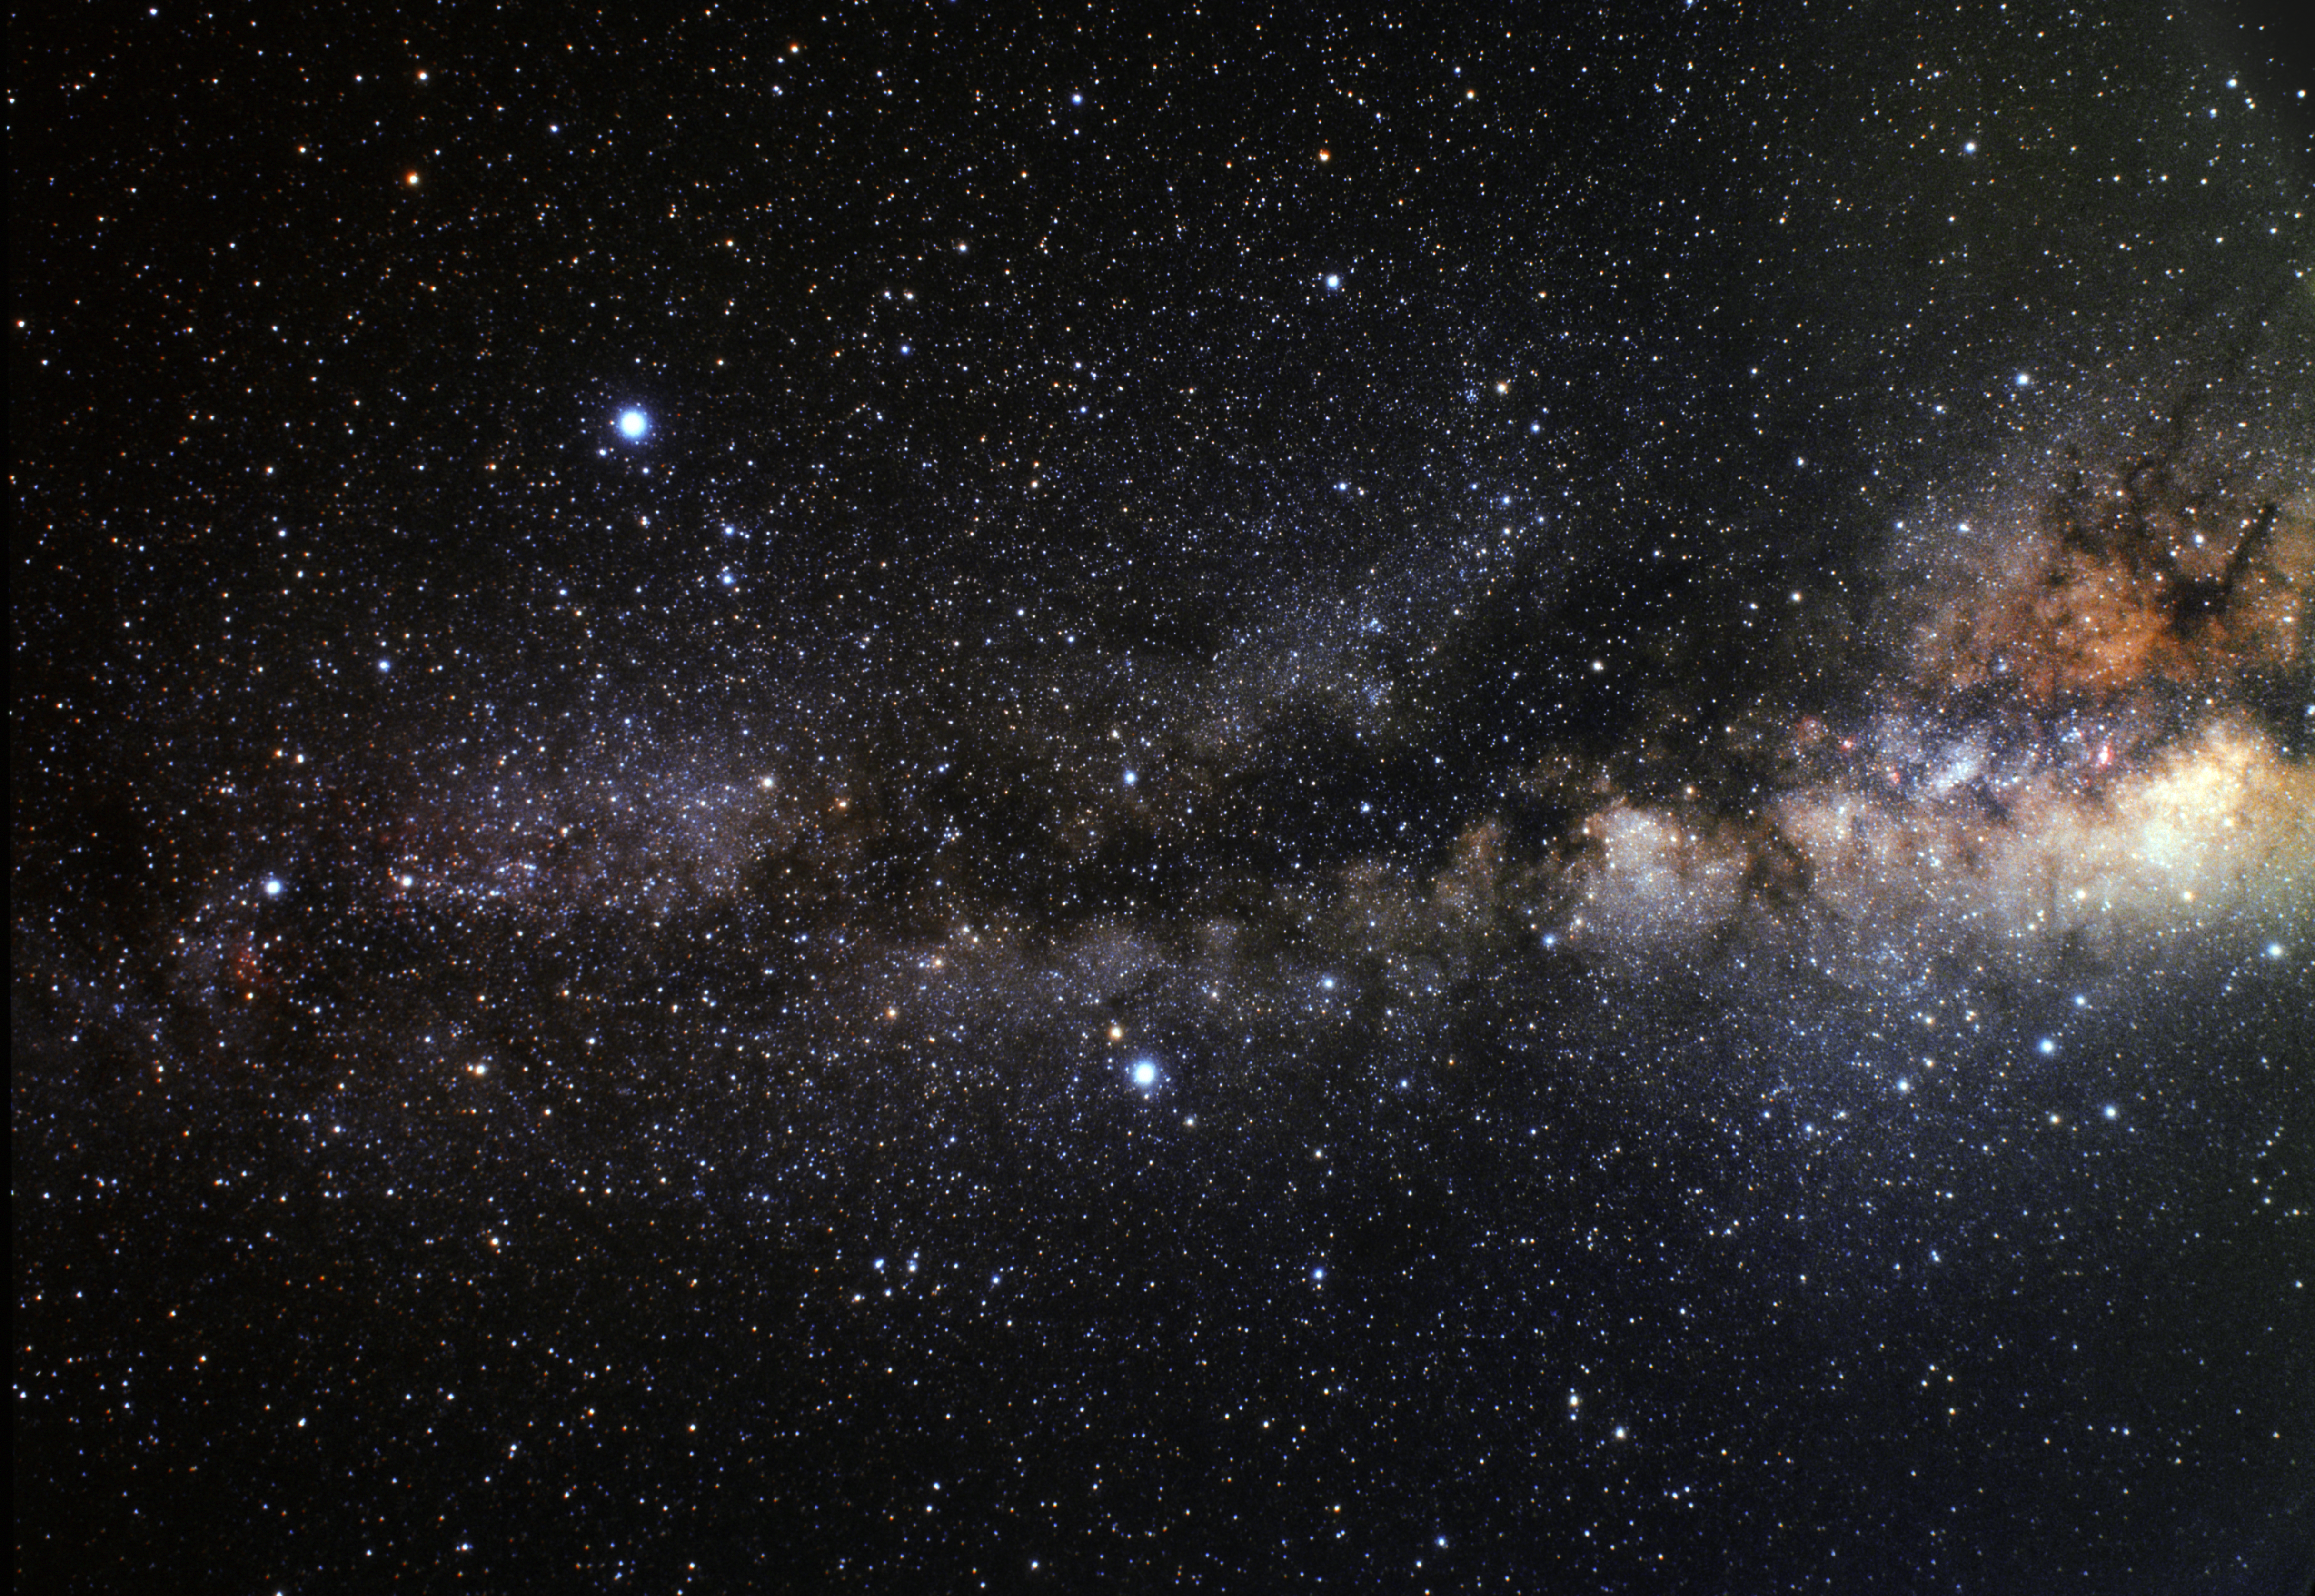

Wide-field view of the Summer Triangle (ground-based image)

A wide field image of the region of sky in which HD 189733b is located. In this image we can see the asterism of the "Summer Triangle" a giant triangle in the sky composed of the three bright stars Vega (top left), Altair (lower middle) and Deneb (far left). HD 189733b is orbiting a star very close to the centre of the triangle.

Credit: A. Fujii